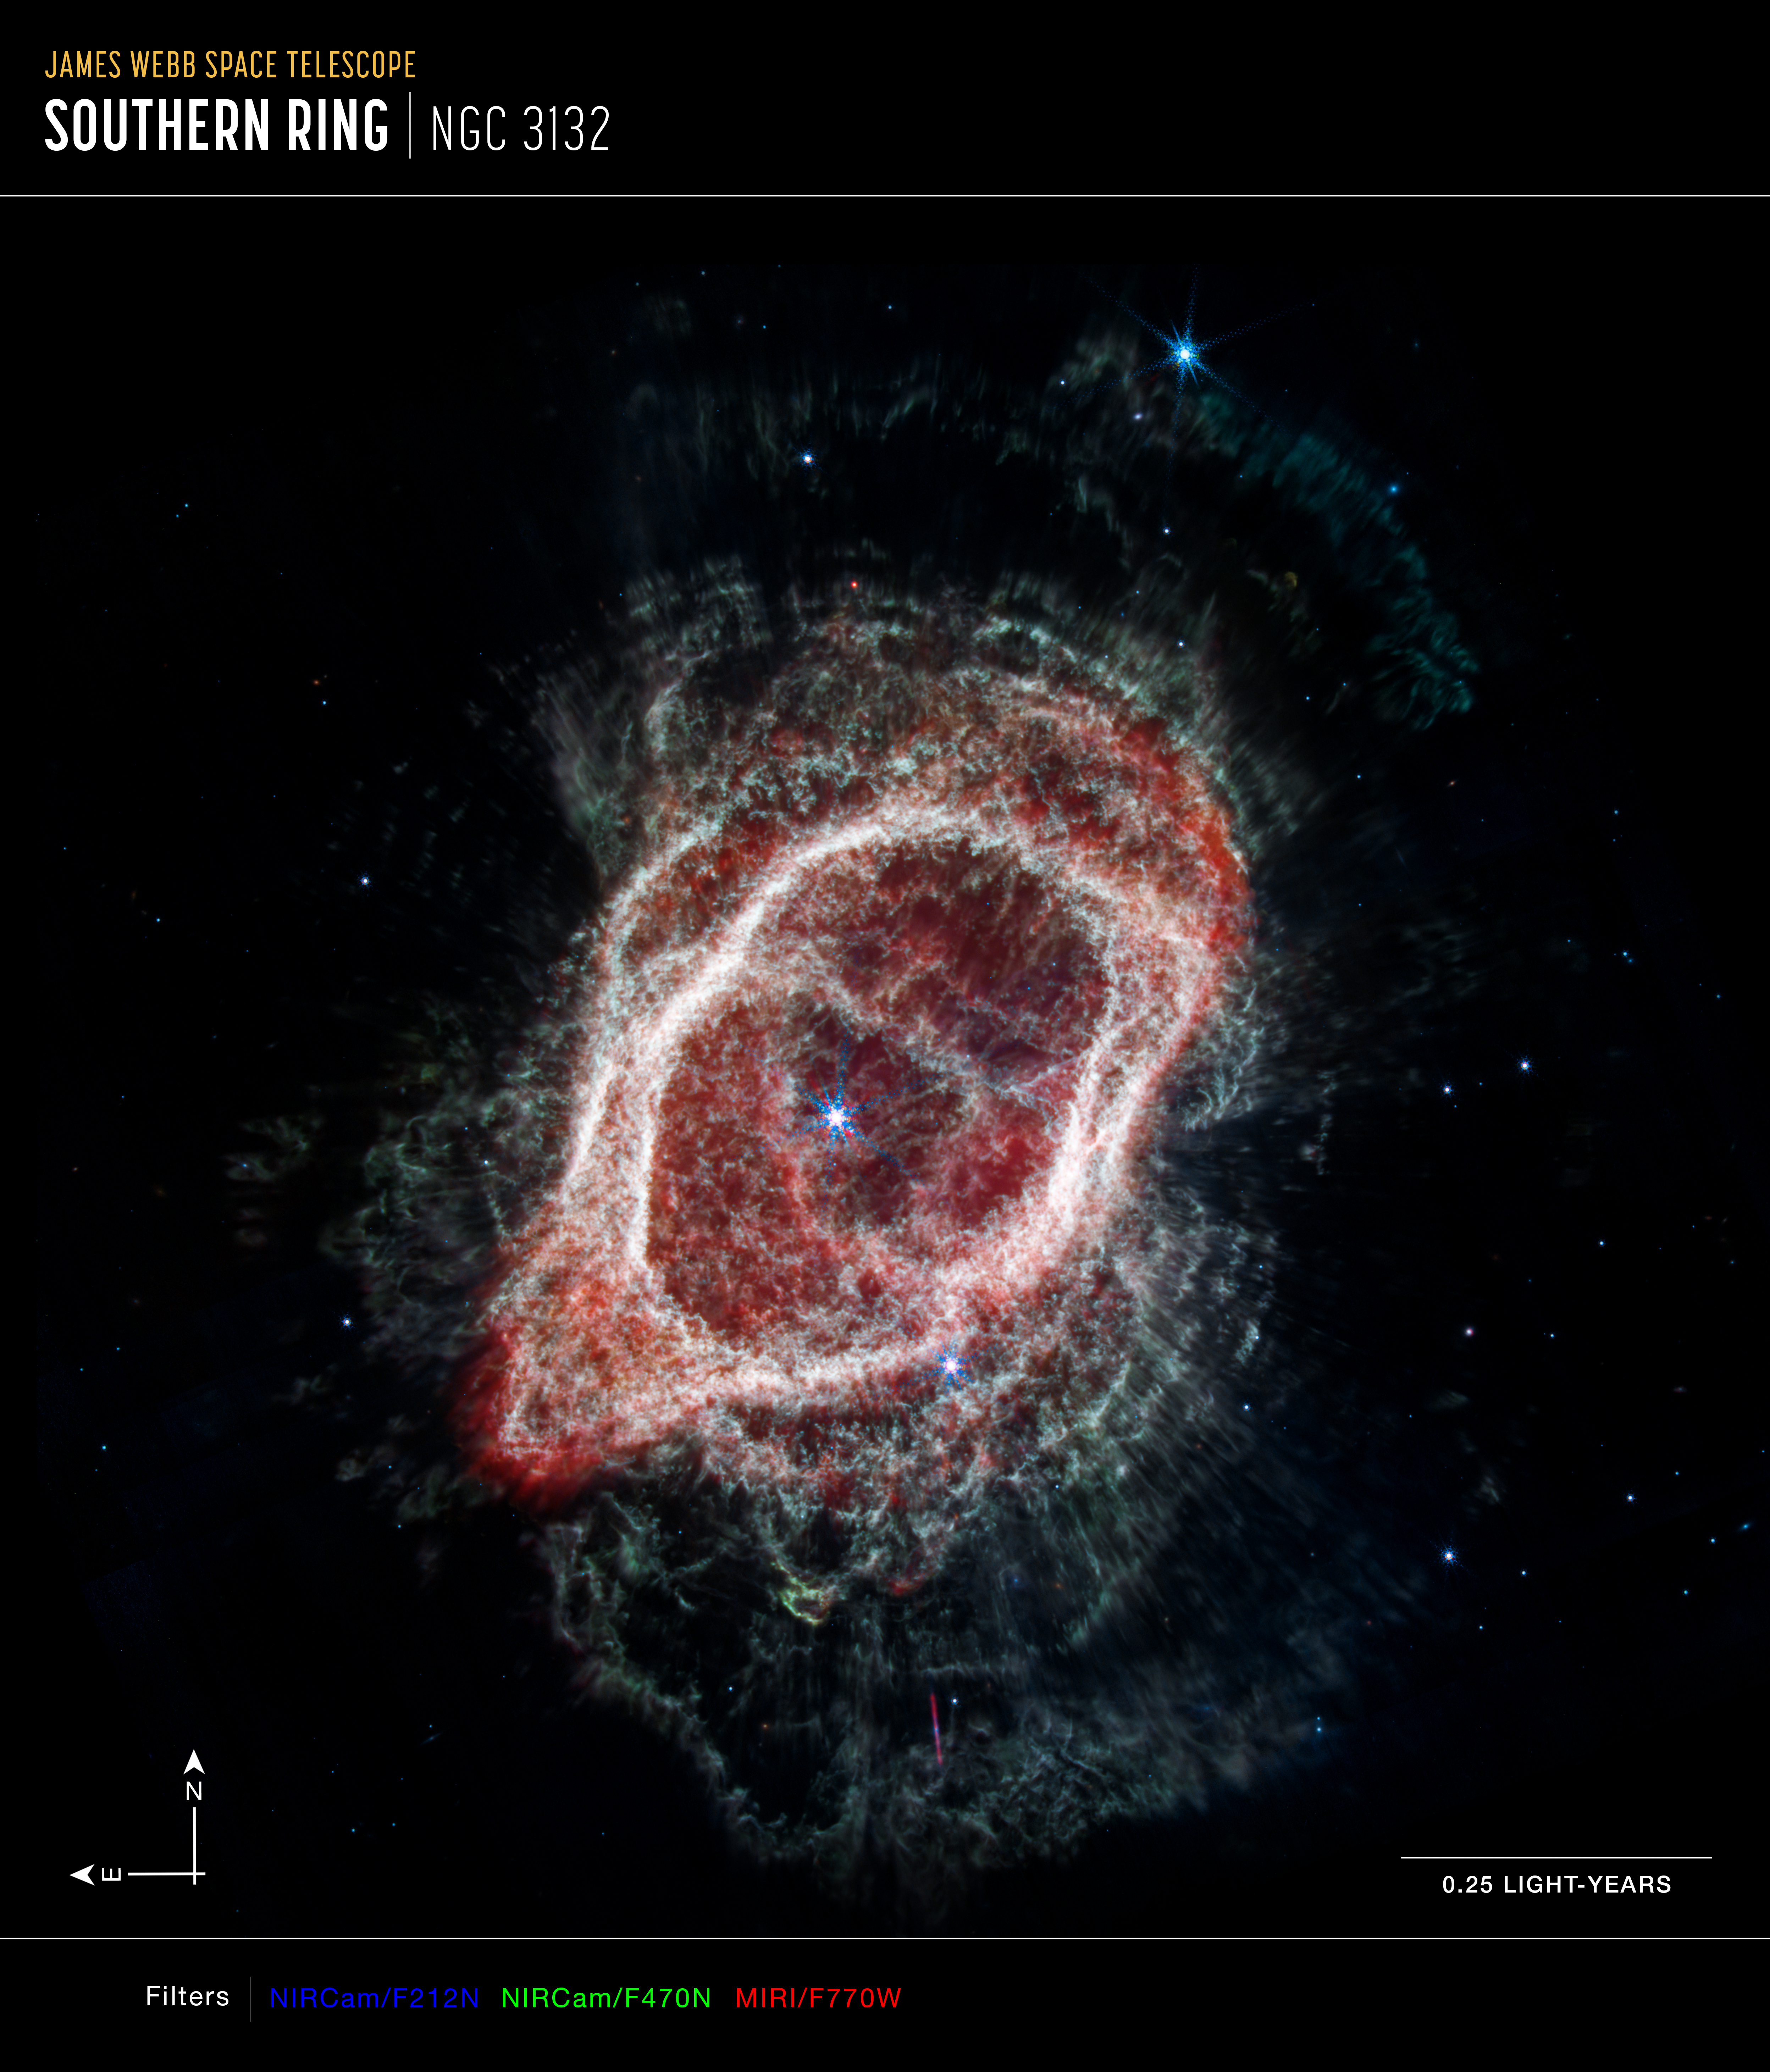

Southern Ring Nebula’s Spokes (NIRCam and MIRI Composite Compass Image - Annotated)

This is an image of the Southern Ring Nebula (NGC 3132), captured by the NASA/ESA/CSA James Webb Space Telescope’s Near-Infrared Camera (NIRCam) and Mid-Infrared Instrument (MIRI). The image combines near- and mid-infrared light from three filters.

Webb’s image traces the star’s scattered outflows that have reached farther into the cosmos. Most of the molecular gas that lies outside the band of cooler gas is also cold. It is also far clumpier, consisting of dense knots of molecular gas that form a halo around the central stars.

The north and east compass arrows show the orientation of the image on the sky. Note that the relationship between north and east on the sky (as seen from below) is flipped relative to direction arrows on a map of the ground (as seen from above).

The scale bar is labeled in light-years, which is the distance that light travels in one Earth-year. (It takes 0.25 years for light to travel a distance equal to the length of the scale bar.) One light-year is equal to about 9.46 trillion kilometers. The field of view shown in this image is approximately 0.25 light-years across.

This image shows invisible near-infrared and mid-infrared wavelengths of light that have been translated into visible-light colors. The color key shows which NIRCam and MIRI filters were used when collecting the light. The color of each filter name is the visible light color used to represent the infrared light that passes through that filter.

Credit: NASA, ESA, CSA, STScI, O. De Marco (Macquarie University), J. DePasquale (STScI)